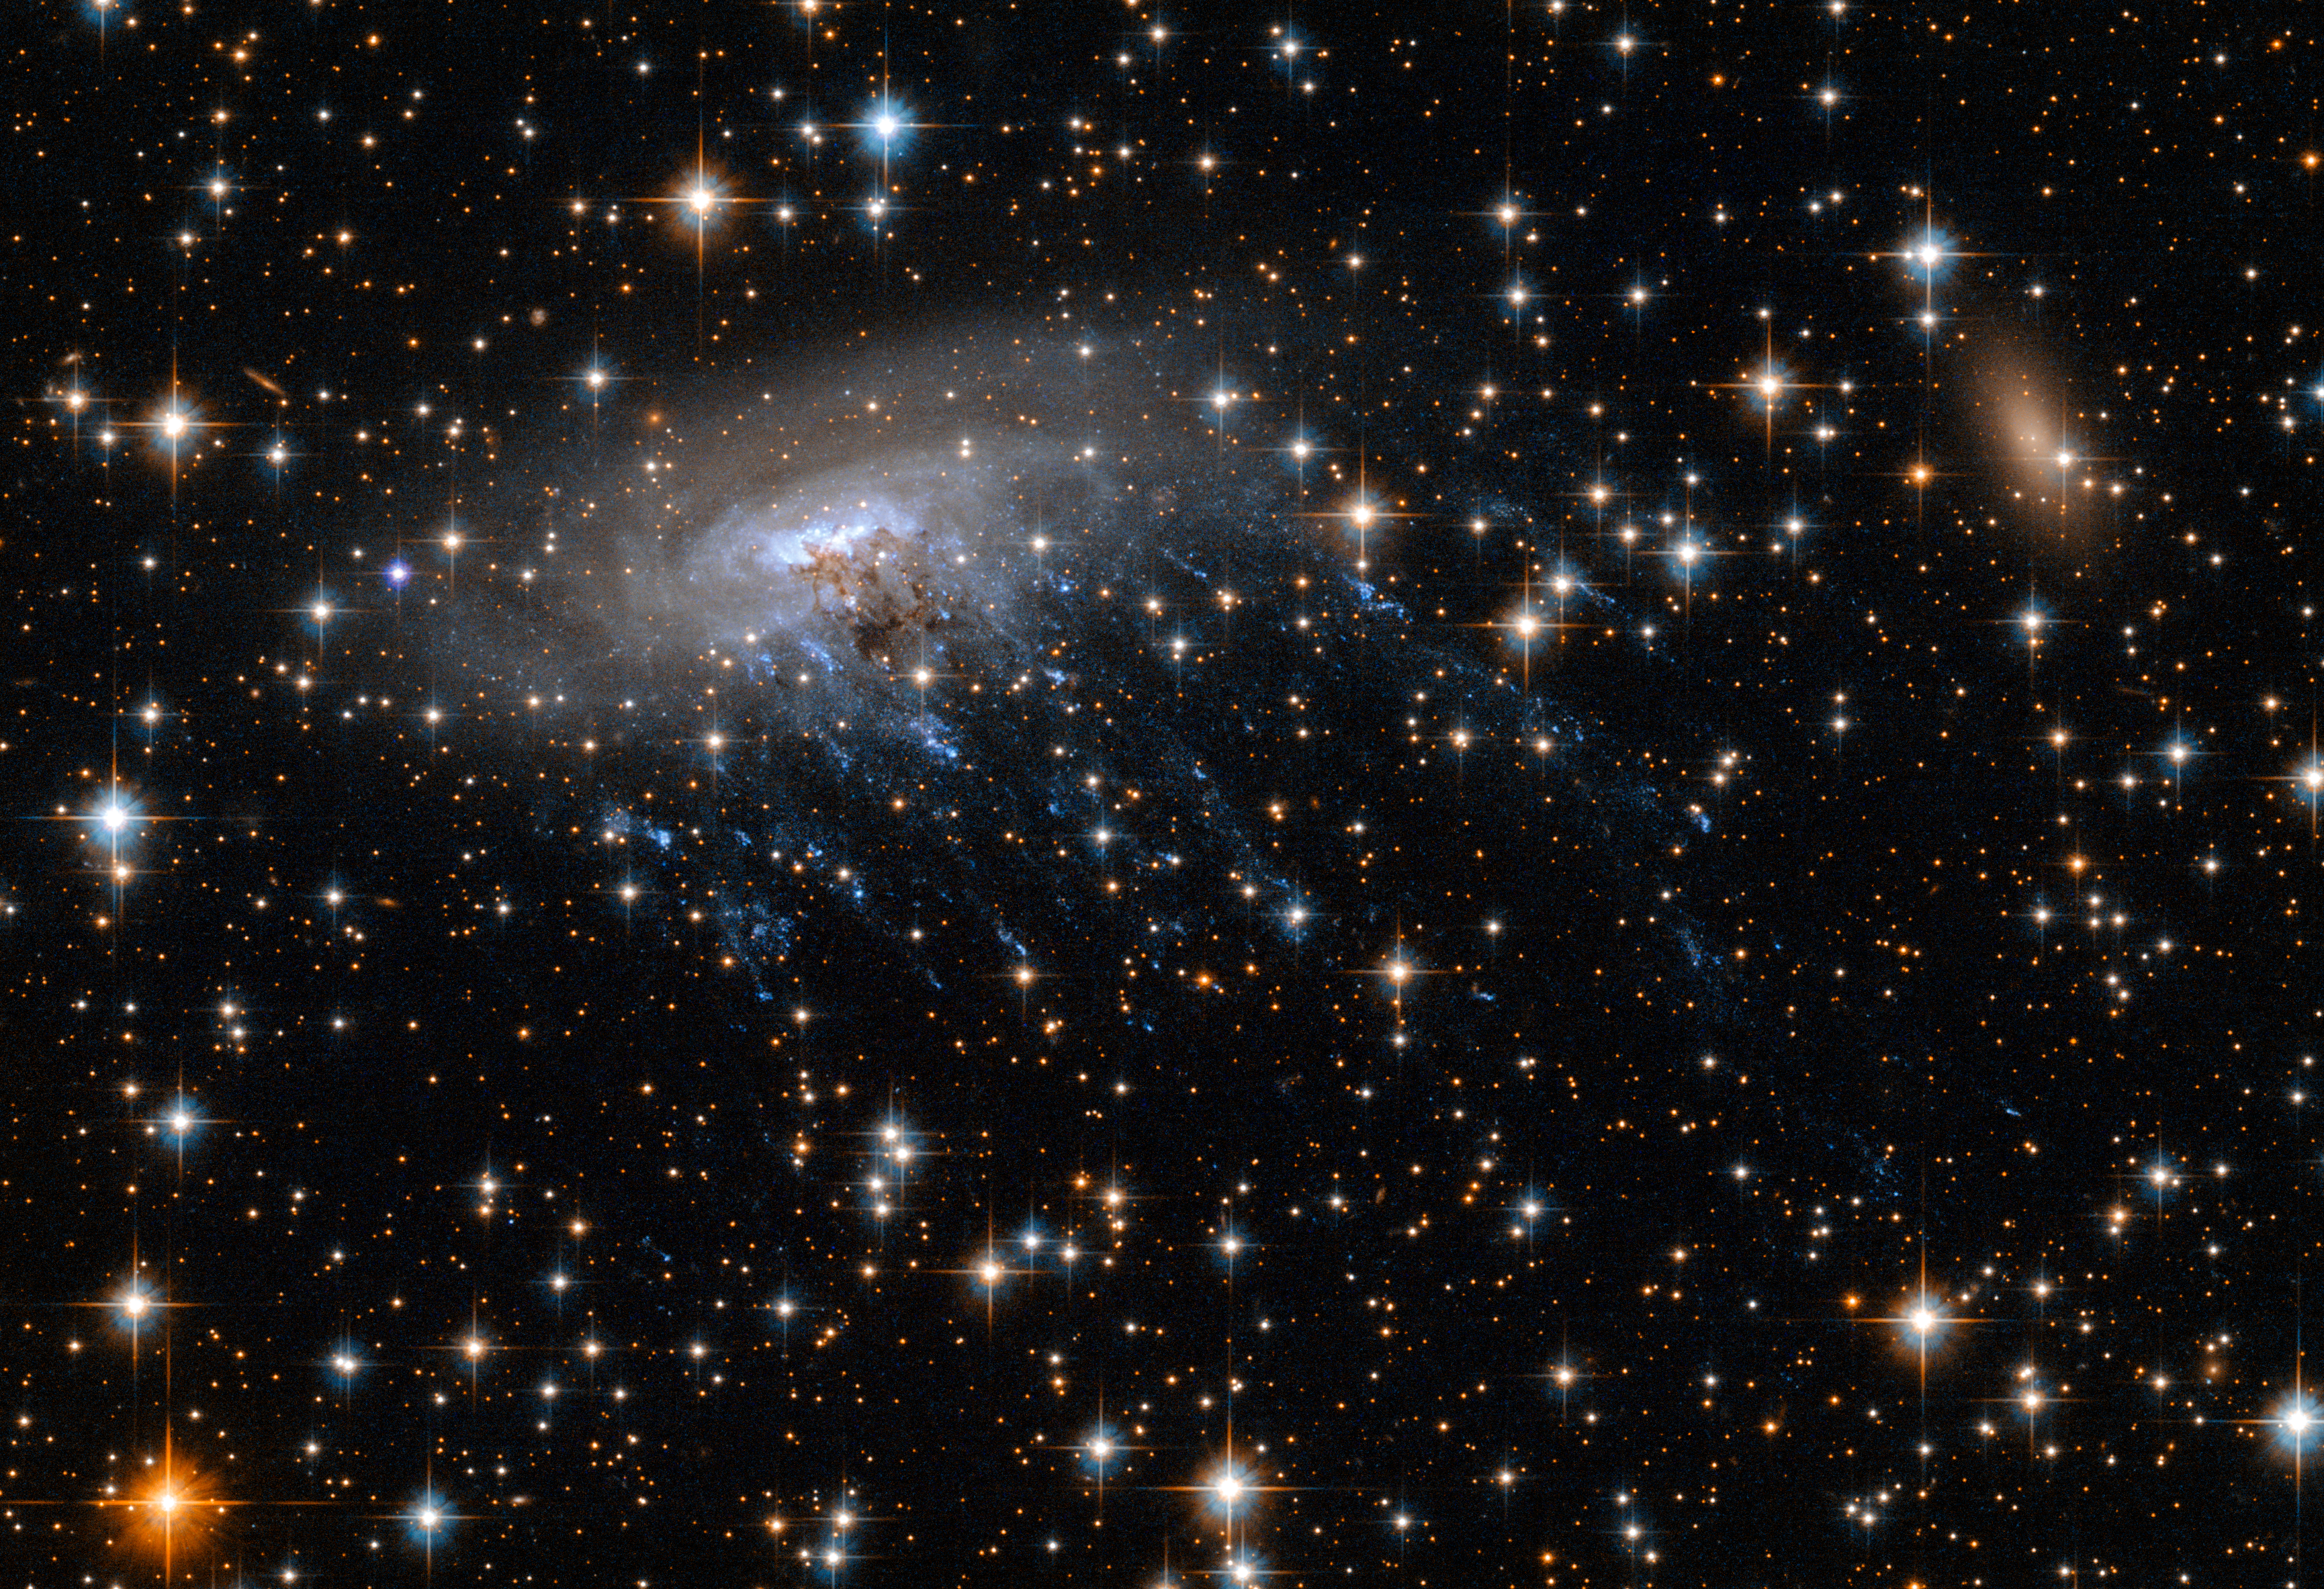

New Hubble image of spiral galaxy ESO 137-001

This new Hubble image shows spiral galaxy ESO 137-001, framed against a bright background as it moves through the heart of galaxy cluster Abell 3627.

This image not only captures the galaxy and its backdrop in stunning detail, but also something more dramatic — intense blue streaks streaming outwards from the galaxy, seen shining brightly in ultraviolet light.

These streaks are in fact hot, wispy streams of gas that are being torn away from the galaxy by its surroundings as it moves through space. This violent galactic disrobing is due to a process known as ram pressure stripping — a drag force felt by an object moving through a fluid.

Credit: NASA, ESA Acknowledgements: Ming Sun (UAH), and Serge Meunier